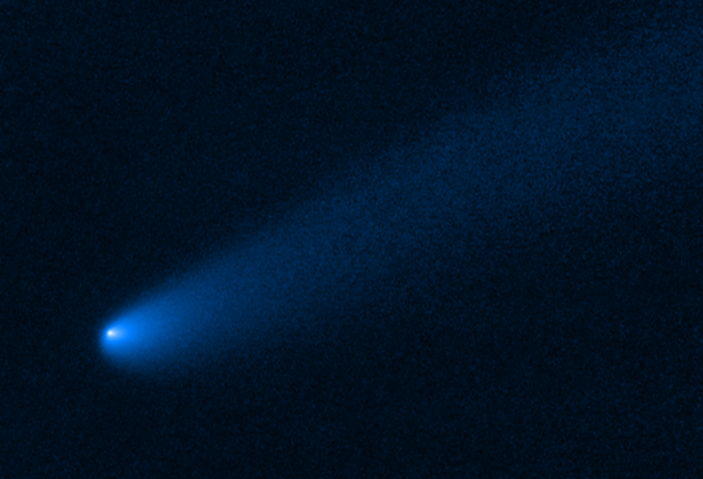

Hubble Spots Vagabond Comet Near Jupiter's Asteroids

The NASA/ESA Hubble Space Telescope snapped this image of the young comet P/2019 LD2 as it orbits near Jupiter's captured ancient asteroids, which are called Trojans. This icy object is the first comet astronomers have spotted near the Trojan population.

The Hubble view reveals a 640,000-kilometer-long tail of dust and gas flowing from the wayward comet's bright solid nucleus. The tail is evidence that the icy object is active, despite its great distance from the faint Sun. The tail could be driven by the release of carbon monoxide and carbon dioxide. These volatiles do not need much sunlight to heat their frozen form and convert them to gas.

The wayfaring comet was discovered in early June 2019 by the University of Hawaii's Asteroid Terrestrial-impact Last Alert System (ATLAS) telescope.

The icy interloper is most likely one of the latest members of the so-called "bucket brigade" of comets to travel inward toward the Sun after getting kicked out of its frigid home in the Kuiper belt through interactions with the outermost giant planet, Neptune.

Located on the outskirts of our solar system, the Kuiper belt is a haven of icy, leftover debris from our planets' construction 4.6 billion years ago.

The vagabond comet is a temporary resident among Jupiter's asteroids. Computer simulations show that the unexpected guest will have a close encounter with Jupiter in roughly another two years. The massive planet will boot the comet toward the inner solar system.

This Hubble visible-light image is a combination of exposures taken April 1 and May 8, 2020, with the Wide Field Camera 3.

Credit: NASA, ESA, STScI, B. Bolin (IPAC/Caltech)